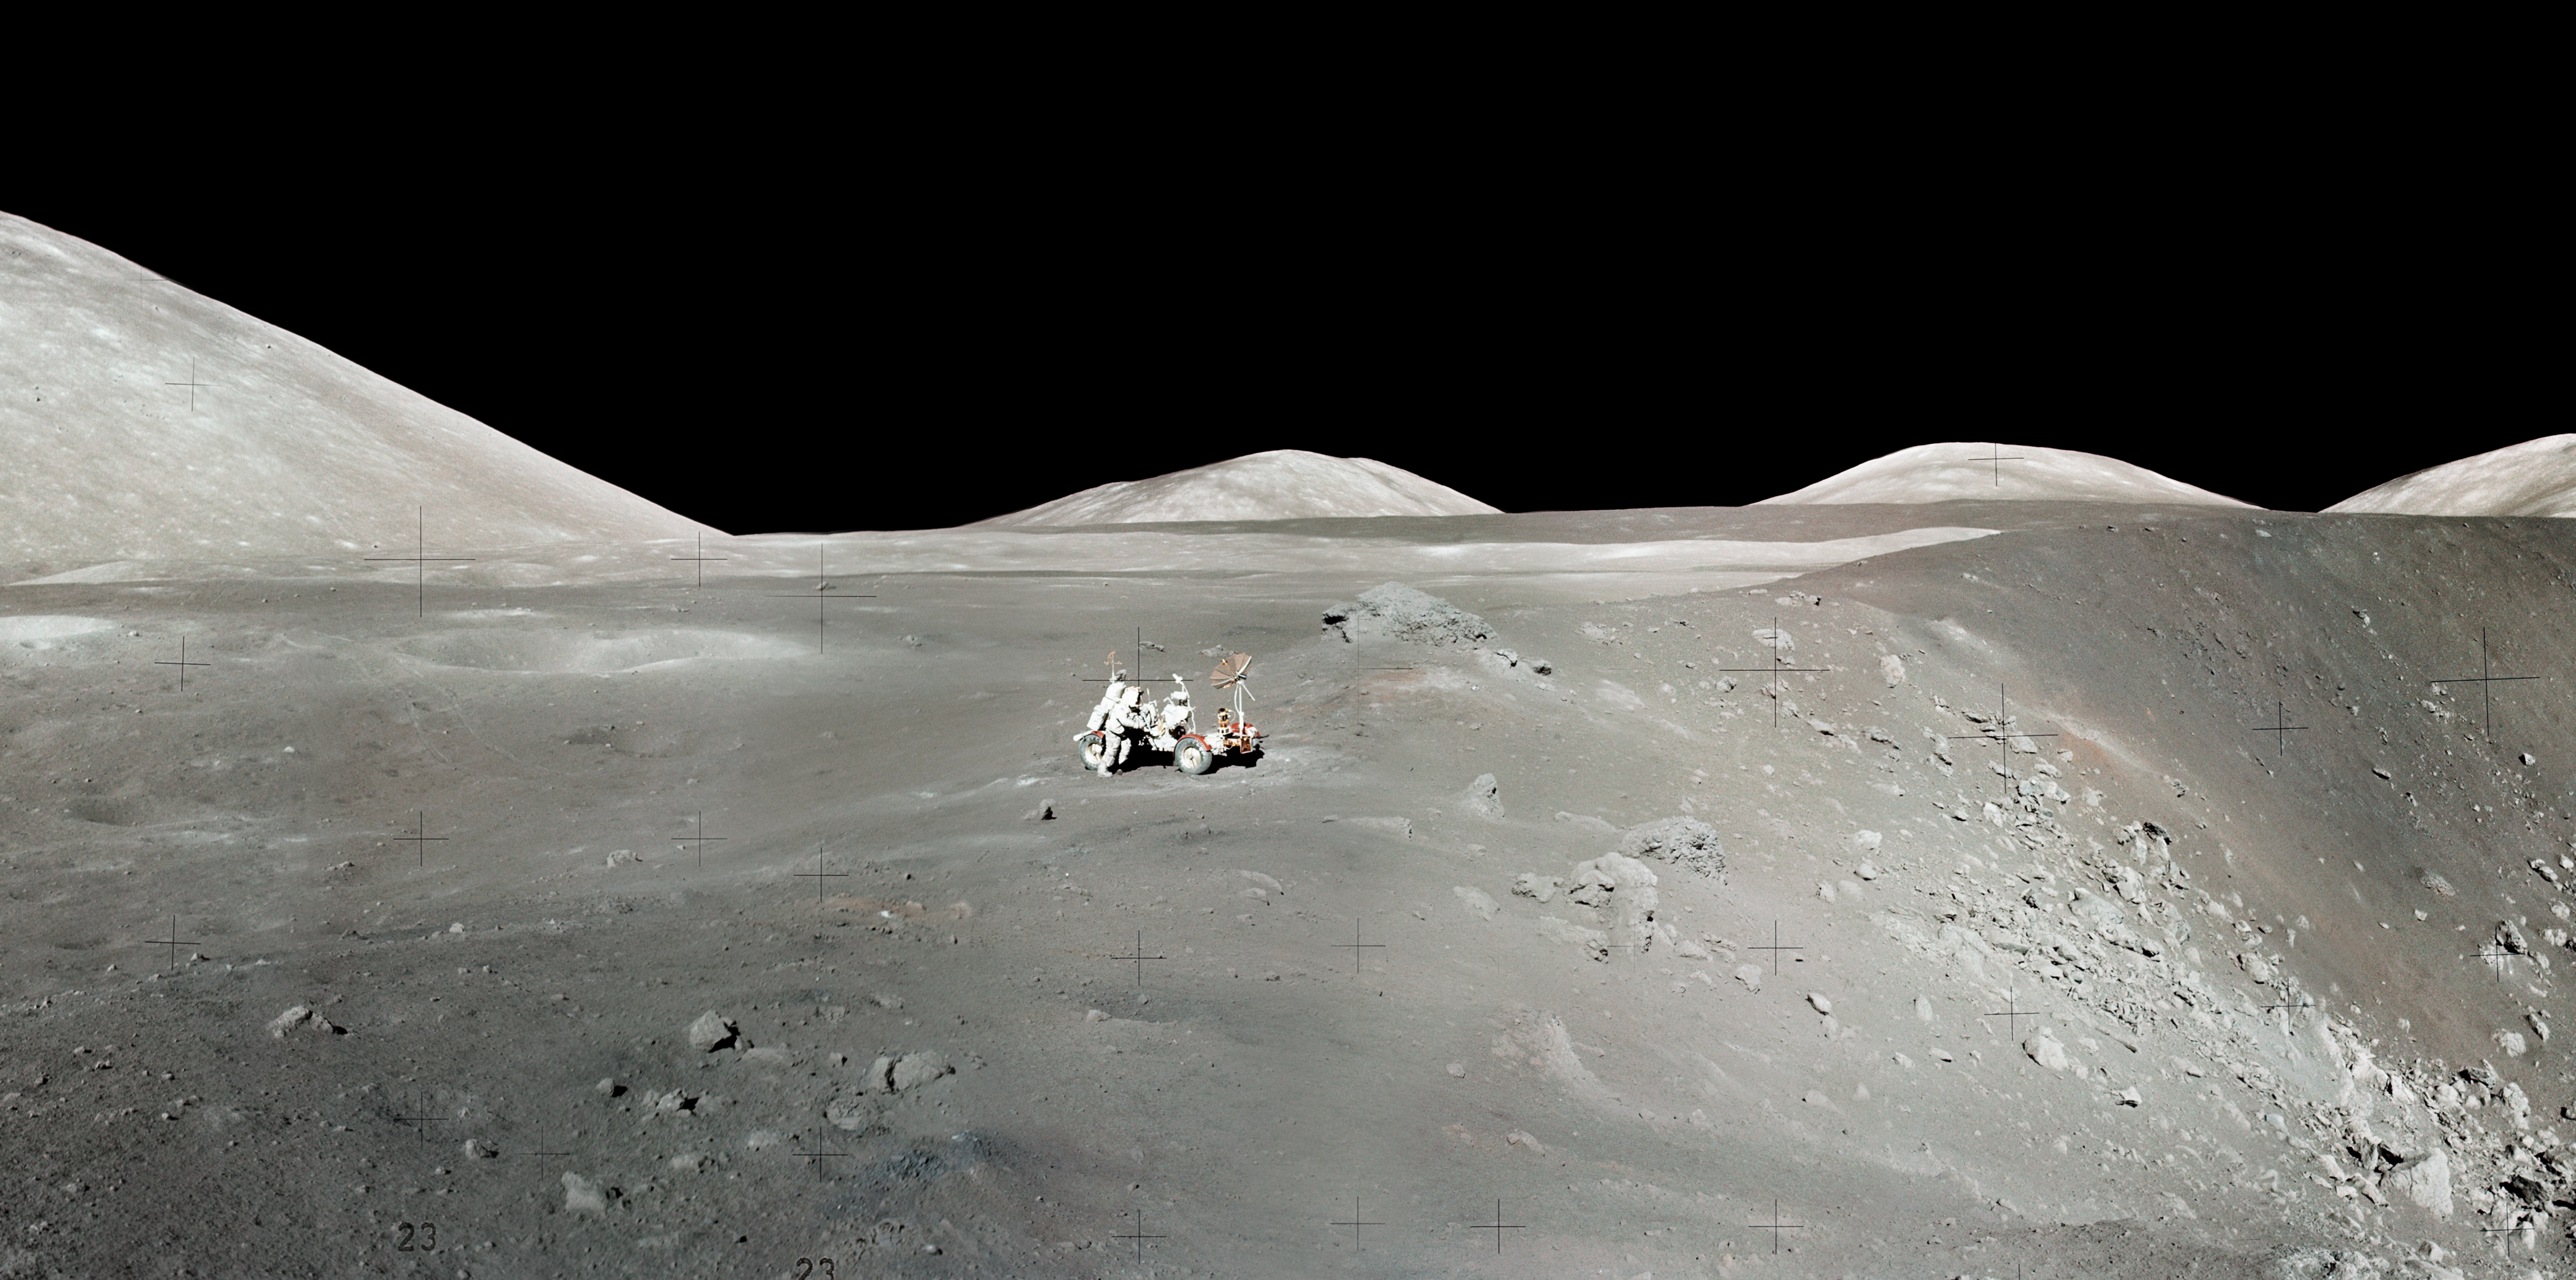

Apollo 17 Astronaut's Snapshot of Taurus-Littrow Valley

This image was constructed by overlaying the Hubble Advanced Camera for Surveys image of the Apollo 17 landing region within the Taurus-Littrow valley, taken on Dec. 16, 2005, with a digital-terrain model acquired by the Apollo program to provide a perspective view looking from west to east up the valley. These Hubble data illustrate the high-resolution resolving power of the Advanced Camera for Surveys and display features smaller than a soccer field from low-Earth orbit some 400,000 kilometers distant. These images were acquired at nearly full Moon, so the long, dark shadows typical of many lunar orbital photos are not seen; however, this is perfect lighting for colour analysis from which to interpret subtle compositional differences. The Hubble Space Telescope Lunar Exploration team is using the Apollo 17 images (and those acquired of the Apollo 15 site) as "ground-truth" in an effort to discriminate lunar materials enriched in ilmenite, a titanium-bearing oxide of potential value as a resource in human exploration of the Moon. The image was processed by the Hubble Space Telescope Lunar Exploration team at NASA's Goddard Space Flight Center, Northwestern University, and the Space Telescope Science Institute.

Credit: NASA, ESA, and J. Garvin (NASA/GSFC)